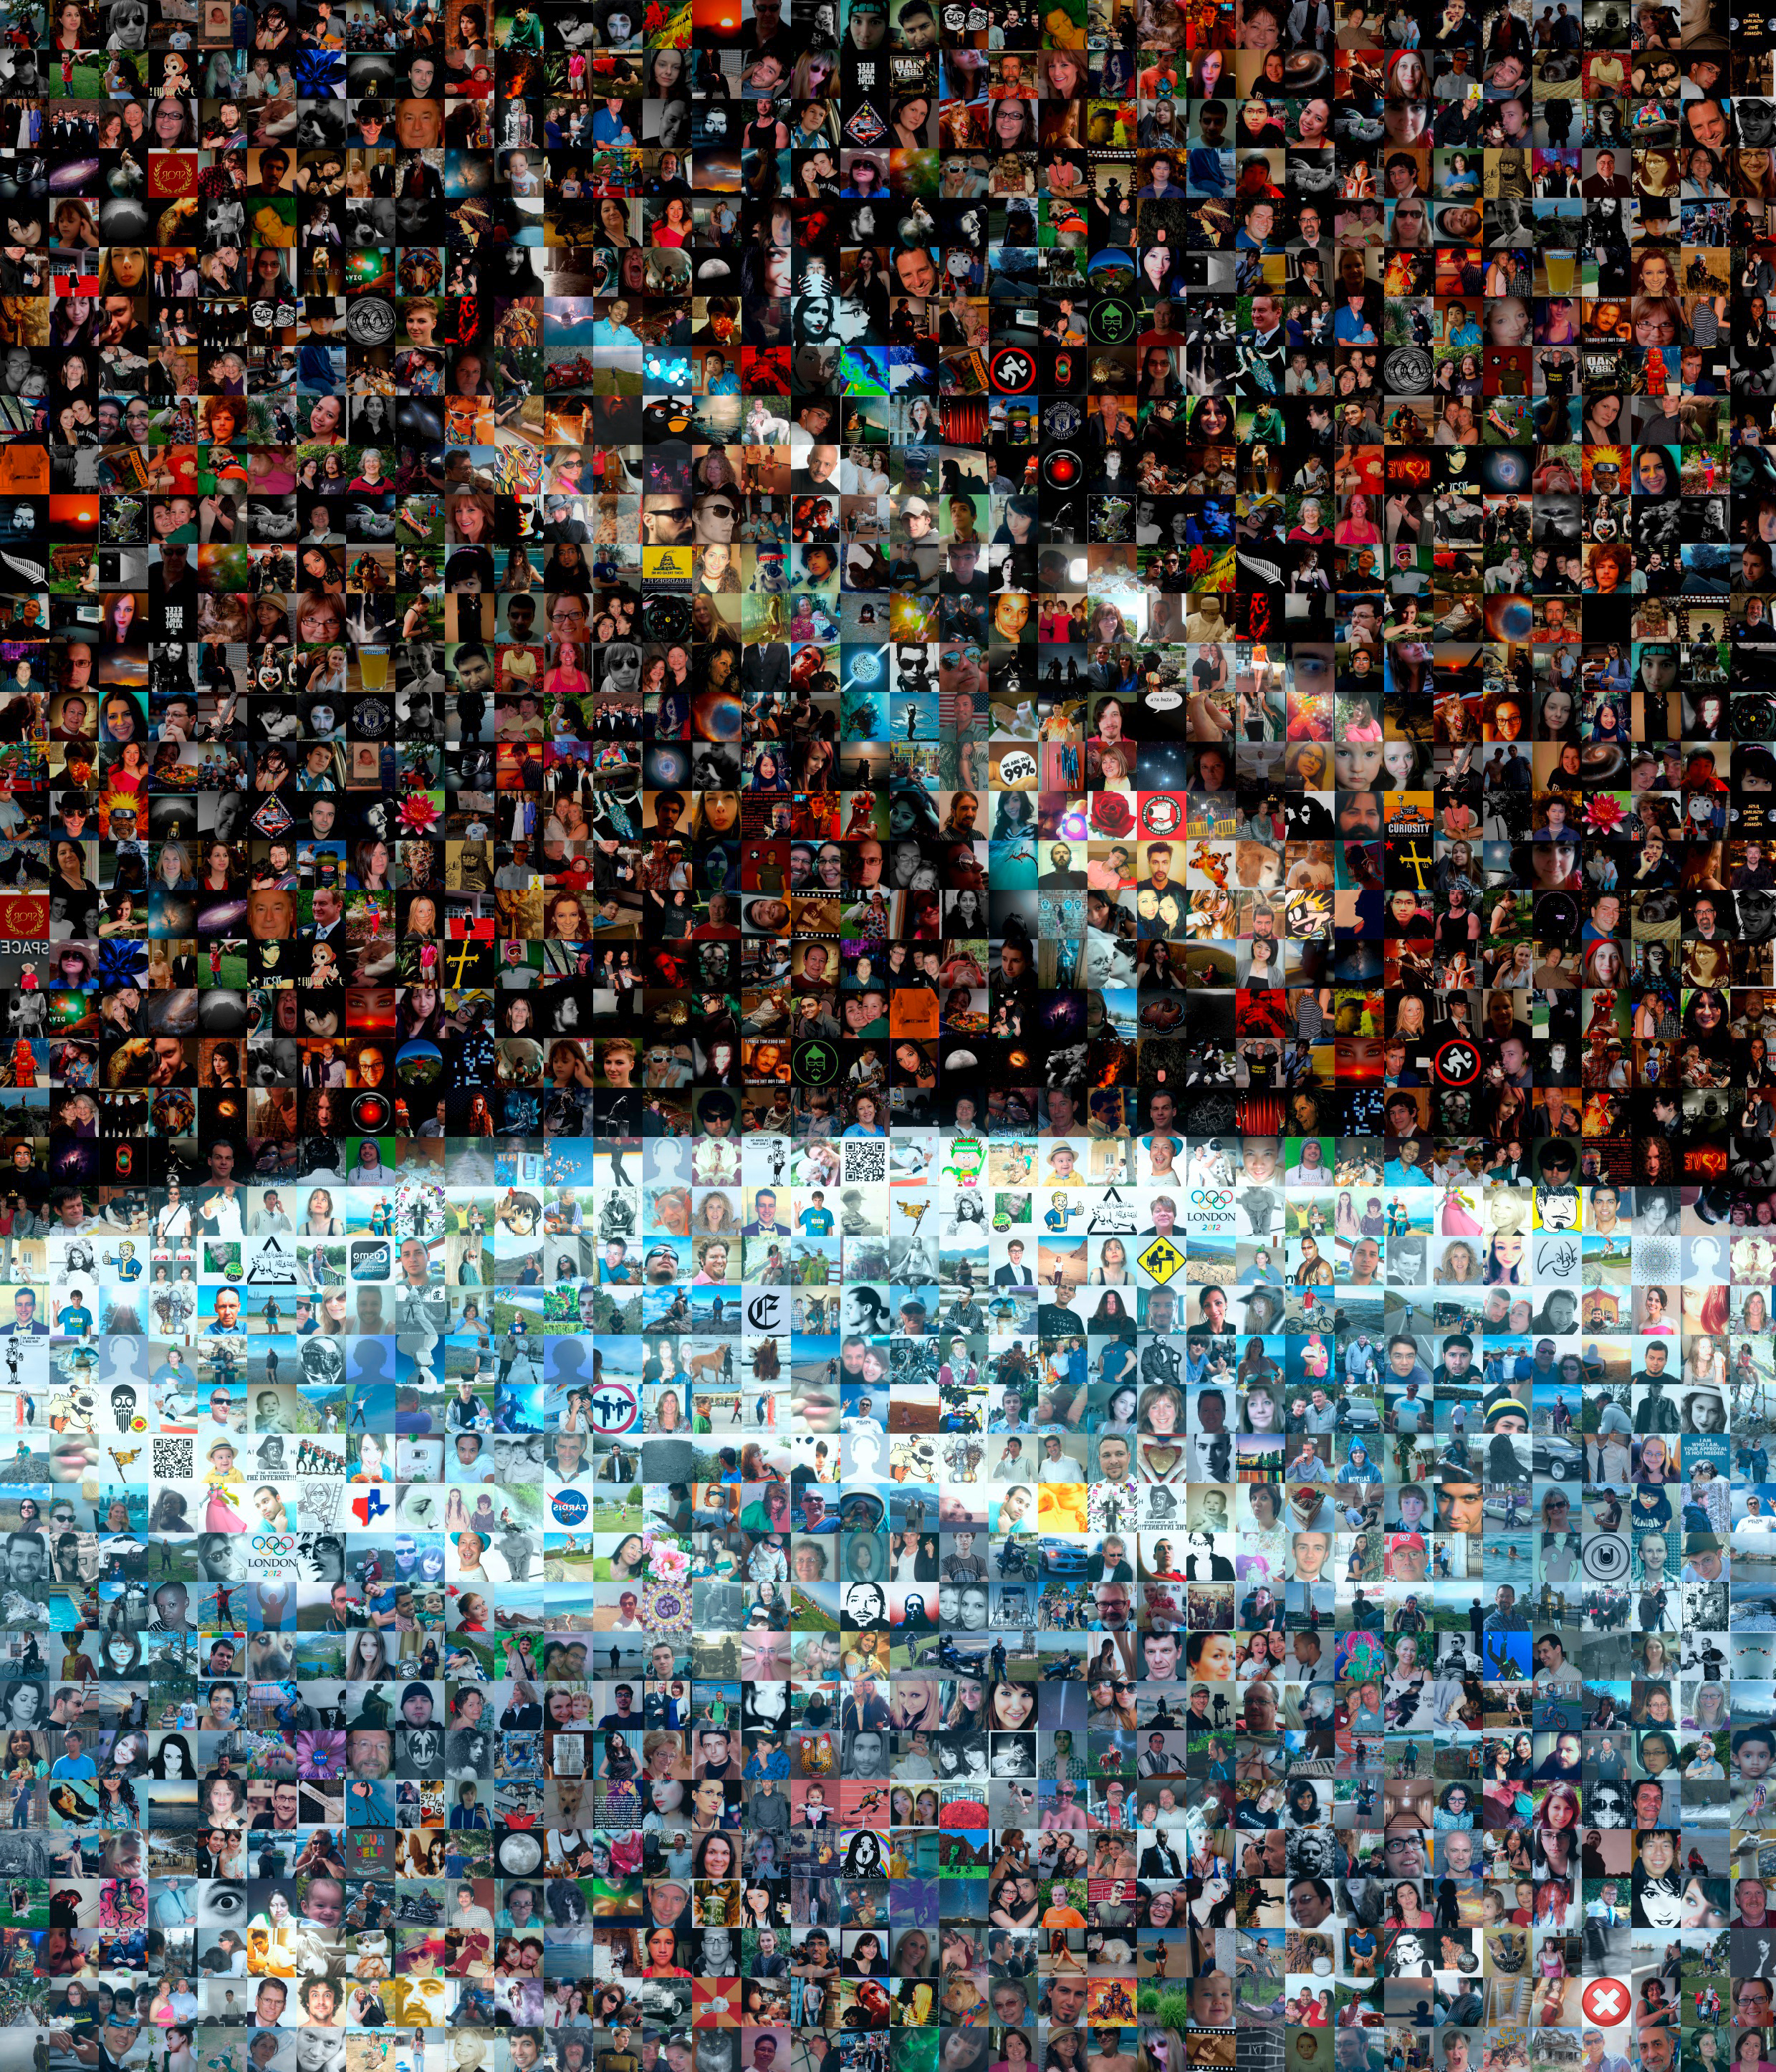

Mosaic: 100 000 Facebook friends

This mosaic image is composed of the Facebook profile pictures of the ESA/Hubble Facebook friends. Each of our Facebook friends acts as a Hubble ambassador every time they share one of our Facebook stories or images with their friends. Although it may seem like a small gesture, their efforts play a role in the bigger picture. This image is to symbolically show the role they play and it was done on the occasion of reaching 100 000 Facebook friends. The image was done with the free software AndreaMosaic.

The original image can be found here.

Credit: ESA/Hubble, AndreaMosaic